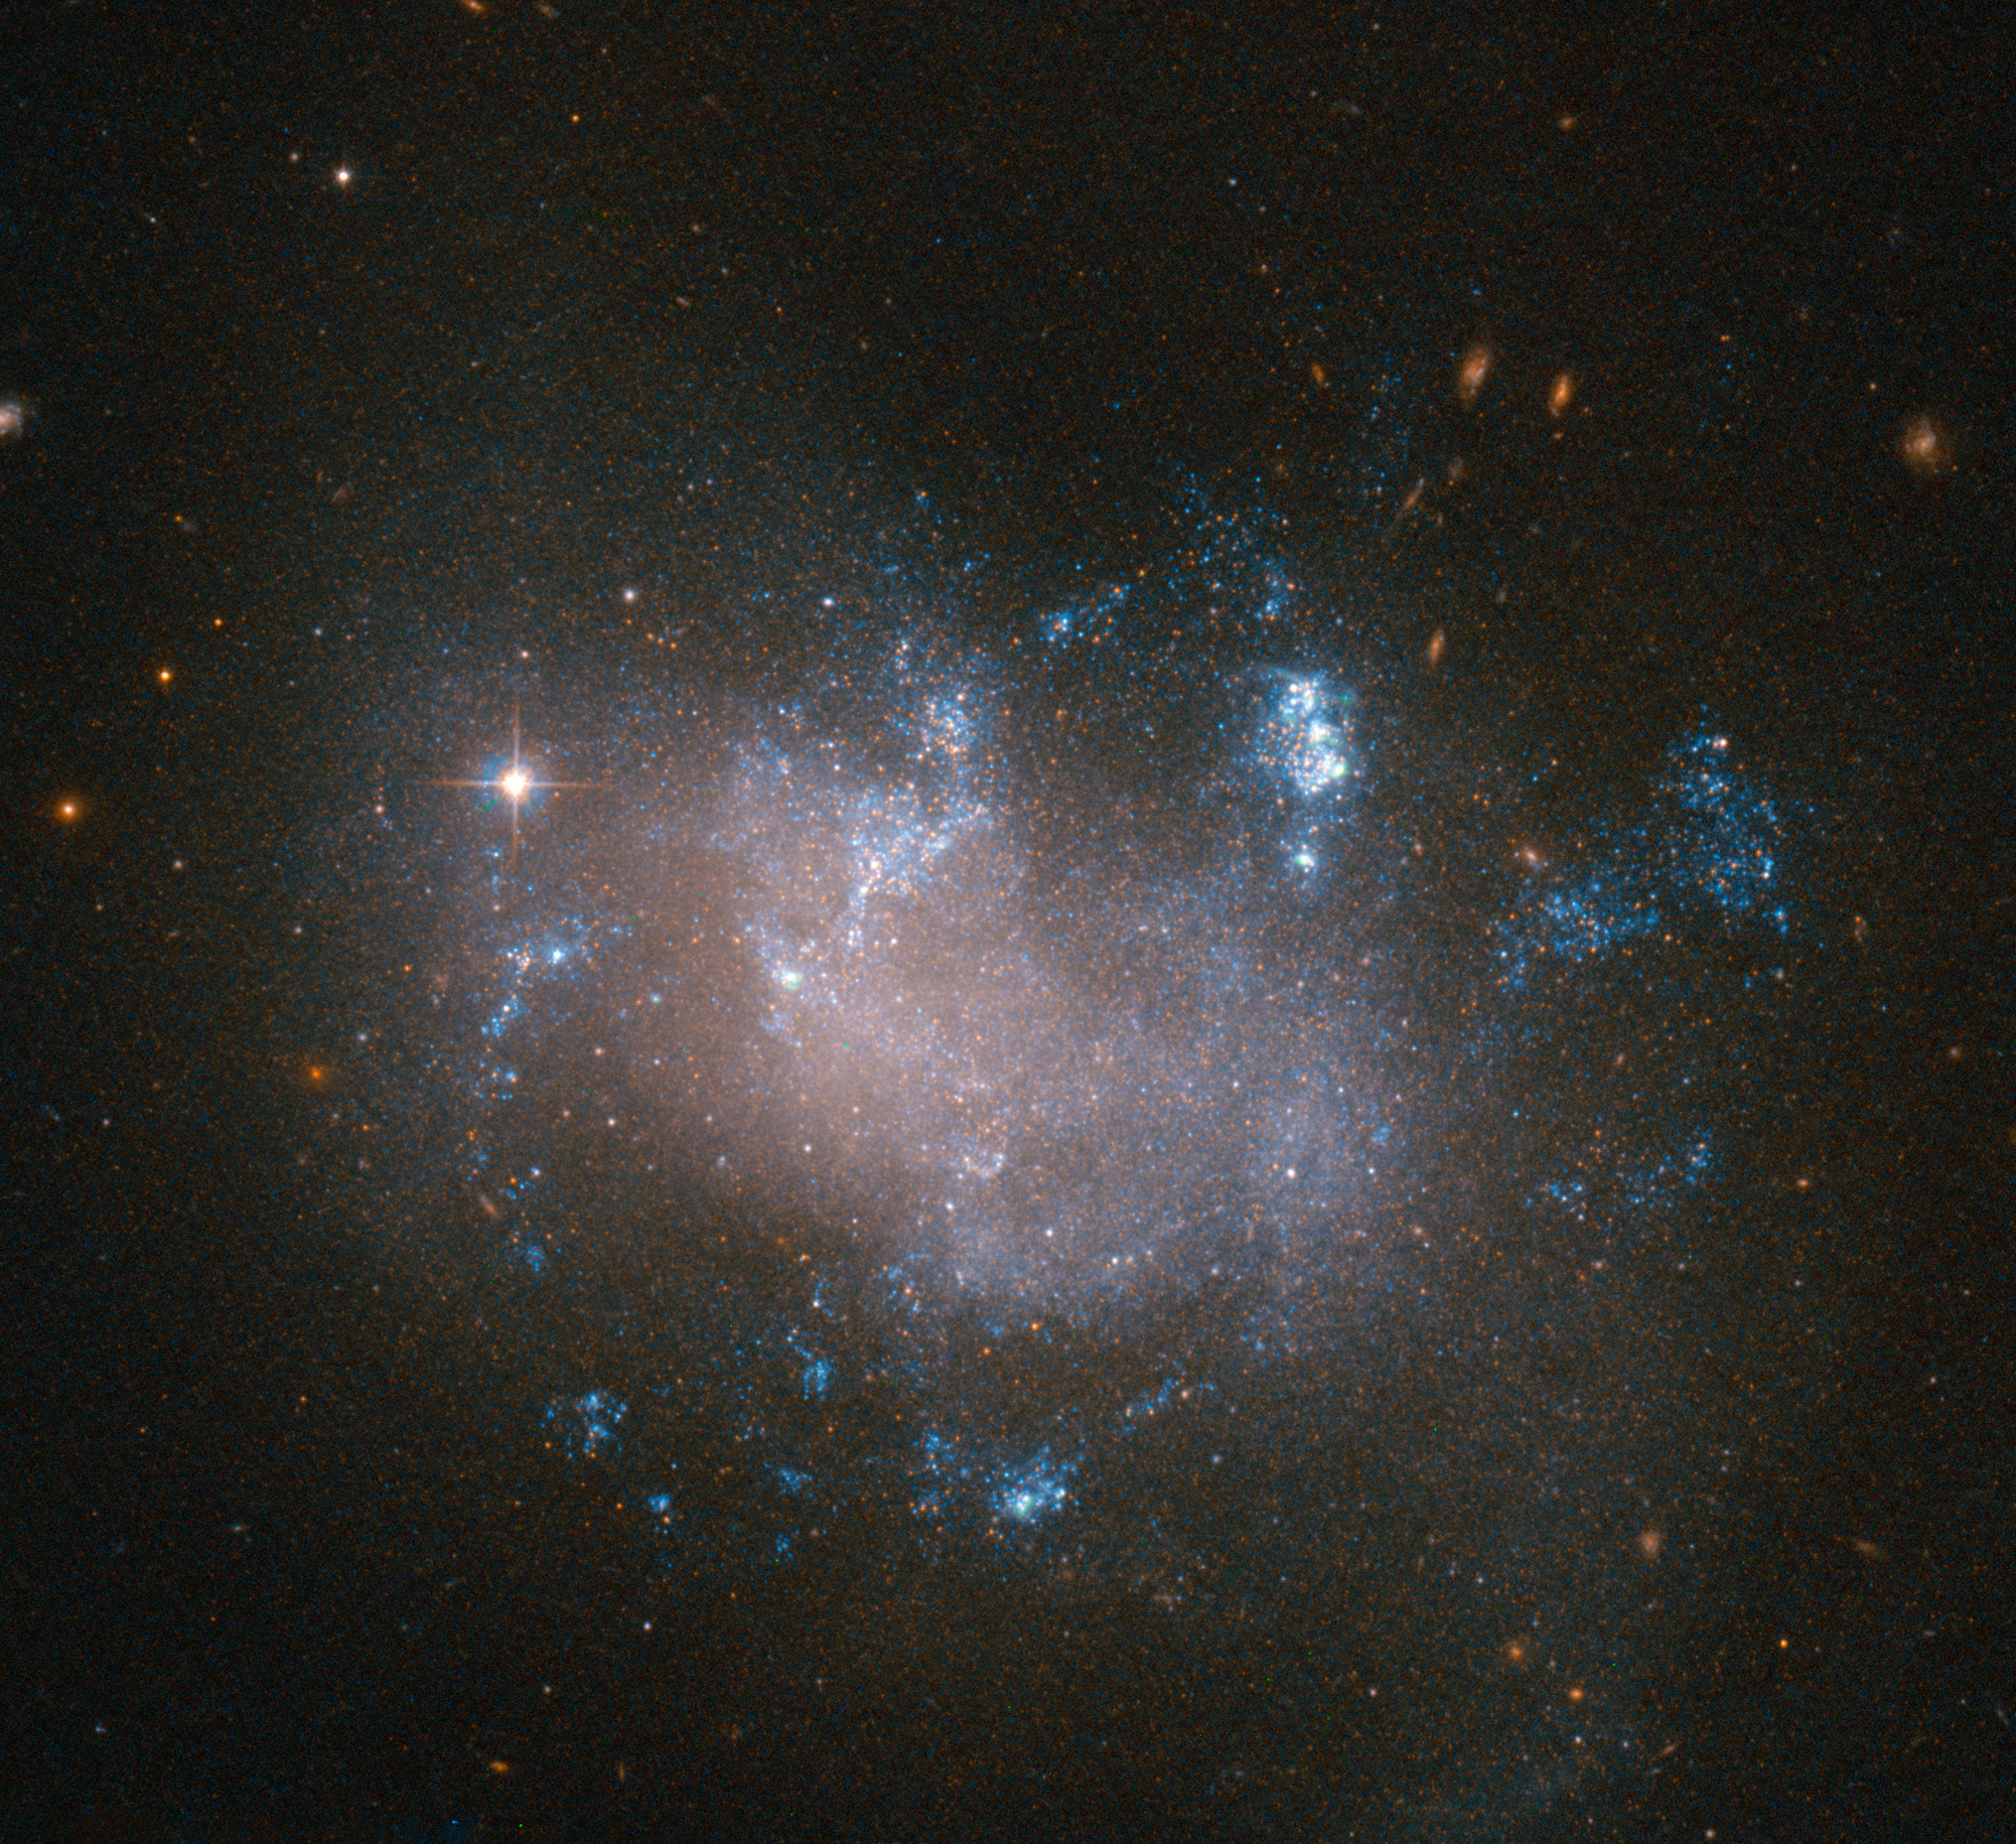

A failed supernova?

Glowing warmly against the dark backdrop of the Universe, this image from the NASA/ESA Hubble Space Telescope shows an irregular galaxy called UGC 12682. Located approximately 70 million light-years away in the constellation of Pegasus (The Winged Horse), UGC 12682 is distorted and oddly-structured, with bright pockets of star formation.

In November 2008, 14-year-old Caroline Moore from New York discovered a supernova in UGC 12682. This made her the youngest person at the time to have discovered a supernova. Follow-up observations by professional astronomers of the so-called SN 2008ha showed that it was peculiarly interesting in many different ways: its host galaxy UGC 12682 rarely produces supernovae. It is one of the faintest supernovae ever observed and after the explosion it expanded very slowly, suggesting that the explosion did not release copious amounts of energy as usually expected.

Astronomers have now classified SN 2008ha as a subclass of a Type Ia supernova, which is the explosion of a white dwarf that hungrily accretes matter from a companion star. SN 2008ha may have been the result of a partially failed supernova, explaining why the explosion failed to decimate the whole star.

Credit: ESA/Hubble & NASA